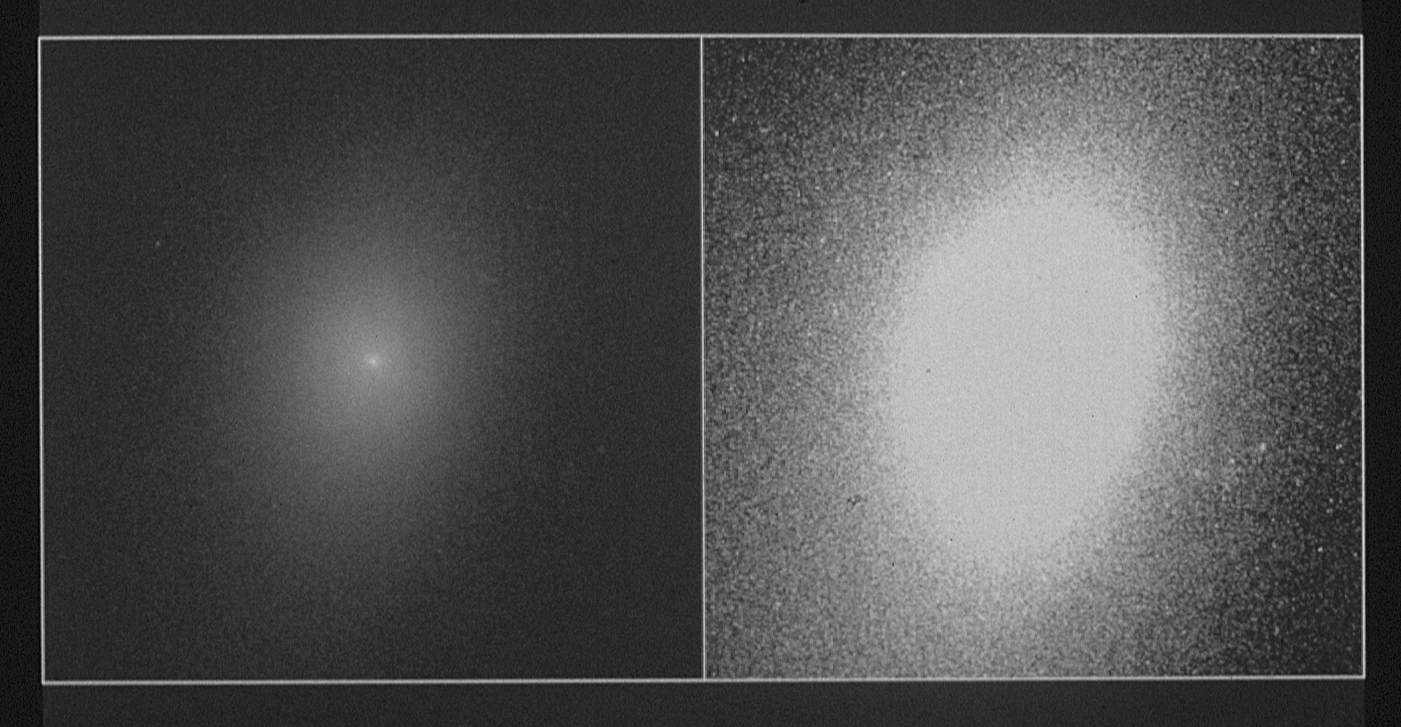

HST image of a galaxy's Nucleus

This Hubble Space Telescope view of galaxy NGC 7457, was taken on August 17, 1990 with the Wide Field and Planetary Camera. The picture on the left with high contrast shows the central portion of the galaxy. Predictably, the density of the starry population smoothly increases toward the galactic center.

The picture on the right is of the same galaxy, but the contrast has been adjusted to reveal a surprisingly high concentration of stars pinpointed exactly at the galaxy's core. The nucleus is so compact it is even beyond HST's .1 arc second resolution. Stars are crammed together at least 30,000 times more densely than they are in our own stellar neighborhood. It is not yet known how this tight core is gravitationally held together.

Credit: NASA/ESA